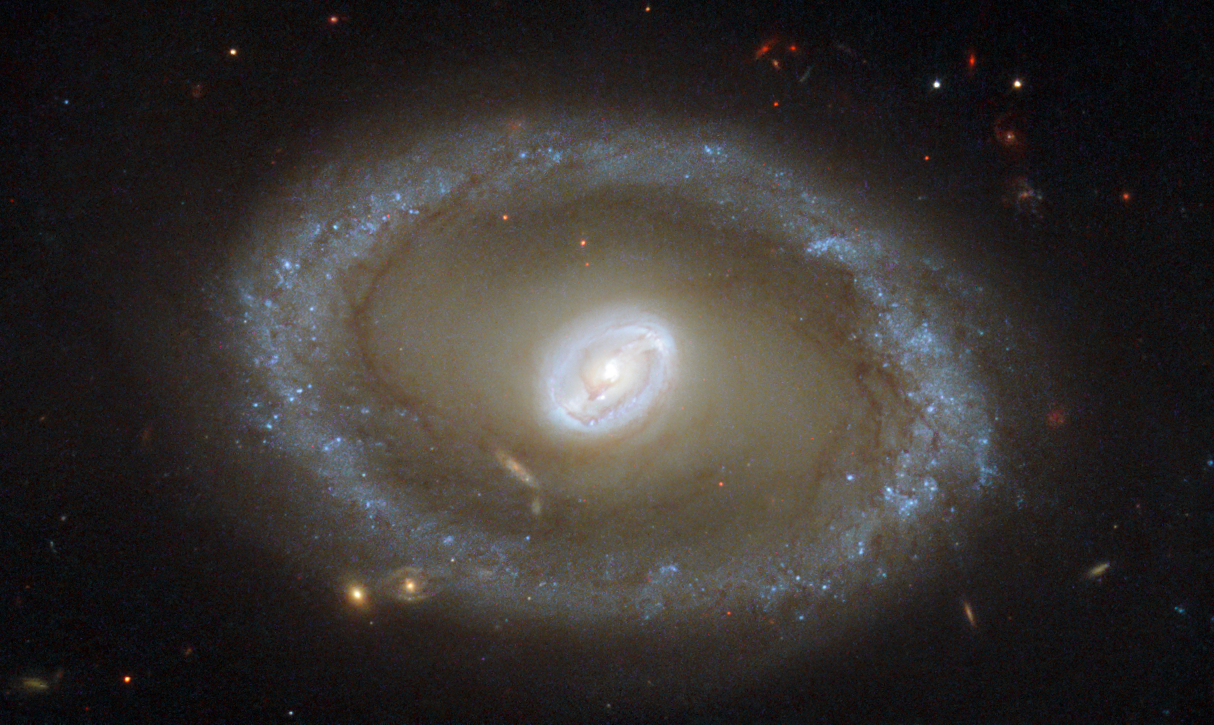

Golden rings of star formation

Taking centre stage in this new NASA/ESA Hubble Space Telescope image is a galaxy known as NGC 3081, set against an assortment of glittering galaxies in the distance. Located in the constellation of Hydra (The Sea Serpent), NGC 3081 is located over 86 million light-years from us. It is known as a type II Seyfert galaxy, characterised by its dazzling nucleus.

NGC 3081 is seen here nearly face-on. Compared to other spiral galaxies, it looks a little different. The galaxy's barred spiral centre is surrounded by a bright loop known as a resonance ring. This ring is full of bright clusters and bursts of new star formation, and frames the supermassive black hole thought to be lurking within NGC 3081 — which glows brightly as it hungrily gobbles up infalling material.

These rings form in particular locations known as resonances, where gravitational effects throughout a galaxy cause gas to pile up and accumulate in certain positions. These can be caused by the presence of a "bar" within the galaxy, as with NGC 3081, or by interactions with other nearby objects. It is not unusual for rings like this to be seen in barred galaxies, as the bars are very effective at gathering gas into these resonance regions, causing pile-ups which lead to active and very well-organised star formation.

Hubble snapped this magnificent face-on image of the galaxy using the Wide Field Planetary Camera 2. This image is made up of a combination of ultraviolet, optical, and infrared observations, allowing distinctive features of the galaxy to be observed across a wide range of wavelengths.

Notes
A paper based on these observations was published in The Astronomical Journal in 2004, entitled "A Hubble Space Telescope Study of Star Formation in the Inner Resonance Ring of NGC 3081" by Ronald J. Buta, Gene G. Byrd, and Tarsh Freeman.

Credit: ESA/Hubble & NASA Acknowledgement: R. Buta (University of Alabama)